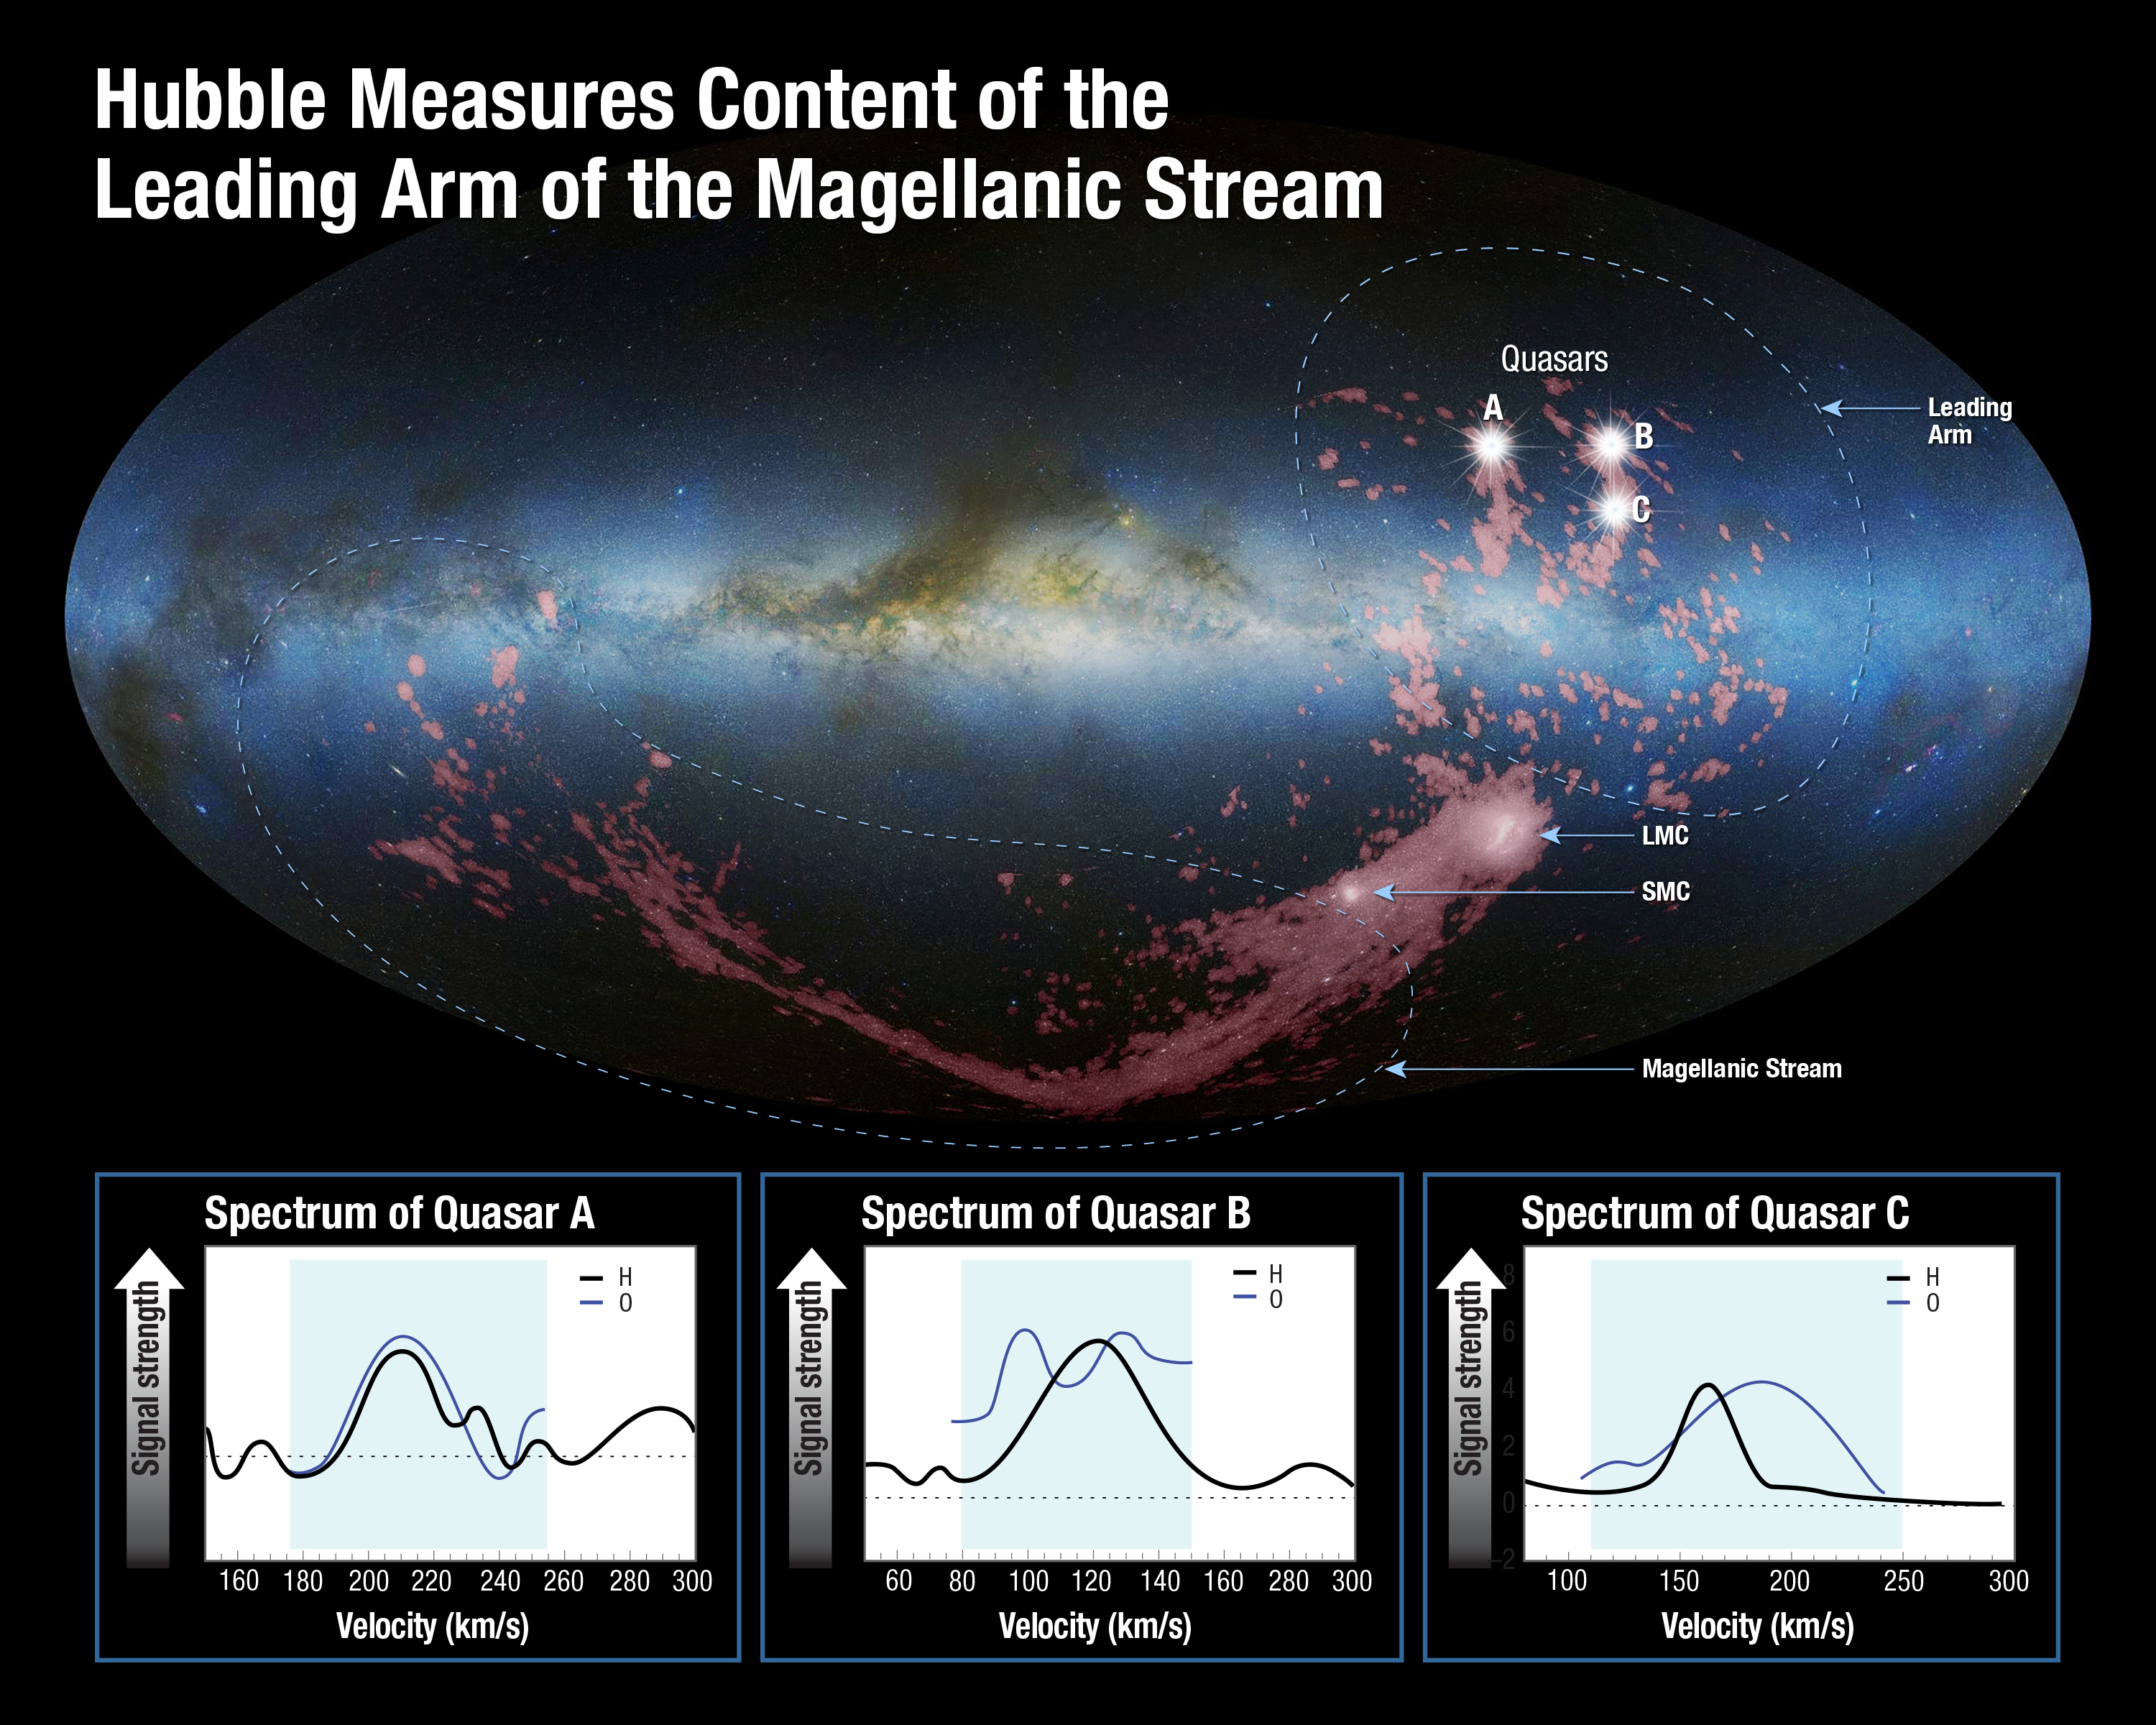

Hubble measures content of the leading arm of the Magellanic Stream

This is a mosaic image of an edge-on view of the Milky Way galaxy, looking toward the central bulge. Superimposed on it are radio-telescope images, coloured pink, of the stretched, arc-shaped Magellanic Stream below the plane of the galaxy and the shredded, fragmented Leading Arm crossing the galaxy’s plane and extending above it. These gas clouds are being gravitationally pulled apart like taffy from the Small and Large Magellanic Clouds — satellite galaxies to our Milky Way — which appear as bright clumps within the gas.

The source of the ribbon-like Magellanic Stream was uncovered by the NASA/ESA Hubble Space Telescope about five years ago, and it was found to come from both Magellanic Clouds. However, the source of the Leading Arm remained a mystery until today. Now, scientists have used Hubble’s ultraviolet capabilities to chemically analyse the gas in the Leading Arm and determine its origin. Because they could not directly sample it, they instead used the light from seven quasars — the bright cores of distant active galaxies — to measure how it filtered through the Leading Arm’s gas. These quasars reside billions of light-years beyond the Leading Arm and act as “lighthouses” shining through the gas.

Scientists looked for the absorption of the quasars’ ultraviolet light by oxygen in the cloud. This is a good indication of how many heavier elements reside in the Leading Arm’s gas. The team then compared Hubble’s measurements to hydrogen measurements made by the Robert C. Byrd Green Bank Telescope in Green Bank, as well as several other radio telescopes.

Marked locations indicate the three brightest of the seven quasars used to study the composition of the Leading Arm. Spectra for these three quasars are superimposed at the bottom of the graphic. The vertical axis of each spectrum indicates how much absorption is taking place. The more absorption, the greater the signal strength is. The horizontal axes indicate the velocities of the gas at different points. Blue boxes isolate the velocities unique to the Leading Arm.

The oxygen, combined with the hydrogen, provided conclusive chemical fingerprints to match the origin of the Leading Arm’s gas. The team found that the gas matches the contents of the Small Magellanic Cloud.

Credit: NASA, ESA, A. Fox (STScI), D. Nidever et al., NRAO/AUI/NSF and A. Mellinger, Leiden-Argentine-Bonn (LAB) Survey, Parkes Observatory, Westerbork Observatory, Arecibo Observatory, and A. Feild (STScI)